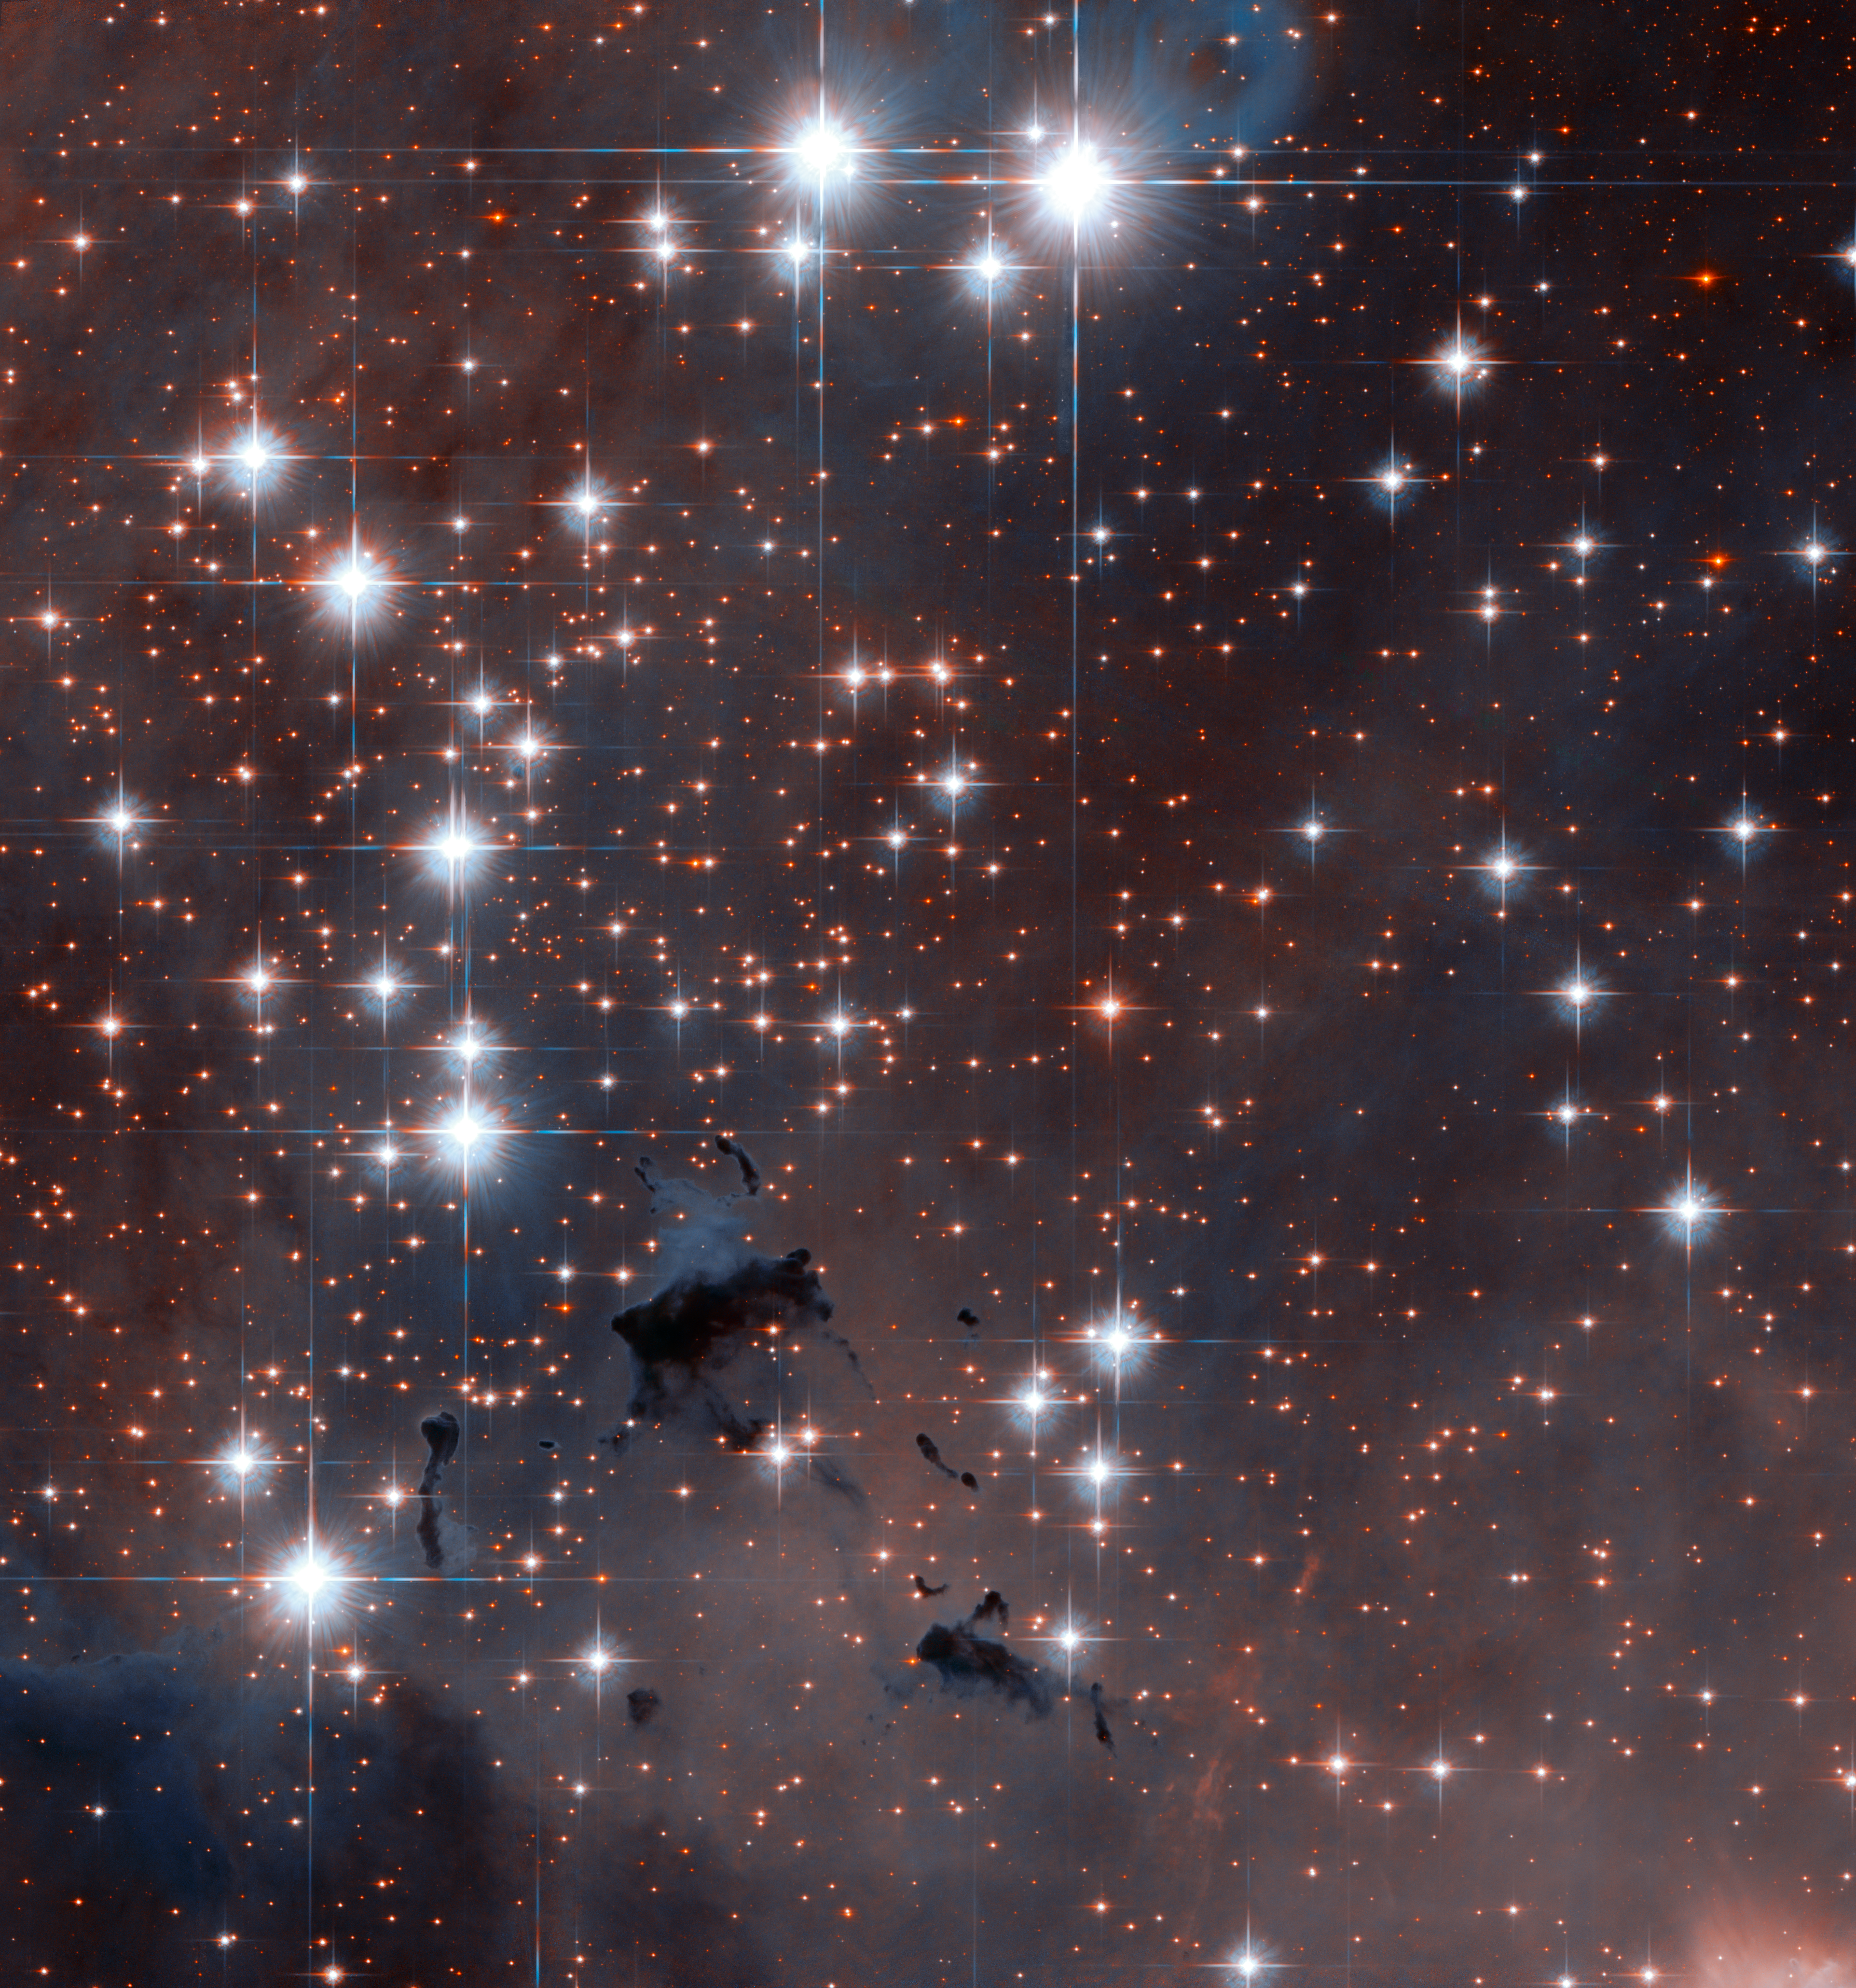

Stellar powerhouses in the Eagle Nebula

A spectacular section of the well-known Eagle Nebula has been targeted by the NASA/ESA Hubble Space Telescope. This collection of dazzling stars is called NGC 6611, an open star cluster that formed about 5.5 million years ago and is found approximately 6500 light-years from the Earth. It is a very young cluster, containing many hot, blue stars, whose fierce ultraviolet glow make the surrounding Eagle Nebula glow brightly. The cluster and the associated nebula together are also known as Messier 16.

Astronomers refer to areas like the Eagle Nebula as HII regions. This is the scientific notation for ionised hydrogen from which the region is largely made. Extrapolating far into the future, this HII region will eventually disperse, helped along by shockwaves from supernova explosions as the more massive young stars end their brief but brilliant lives.

In this image, dark patches can also be spotted, punctuating the stellar landscape. These areas of apparent nothingness are actually very dense regions of gas and dust, which obstruct light from passing through. Many of these may be hiding the sites of the early stages of star formation, before the fledgling stars clear away their surroundings and burst into view. Dark nebulae, large and small, are dotted throughout the Universe. If you look up to the Milky Way with the naked eye from a dark, remote site, you can easily spot some huge dark nebulae blocking the background starlight.

This picture was created from images from Hubble’s Wide Field Channel of the Advanced Camera for Surveys through the unusual combination of two near-infrared filters (F775W, coloured blue, and F850LP, coloured red). The image has also been subtly colourised using a ground-based image taken through more conventional filters. The Hubble exposure times were 2000 s in both cases and the field of view is about 3.2 arcminutes across.

Credit: ESA/Hubble & NASA